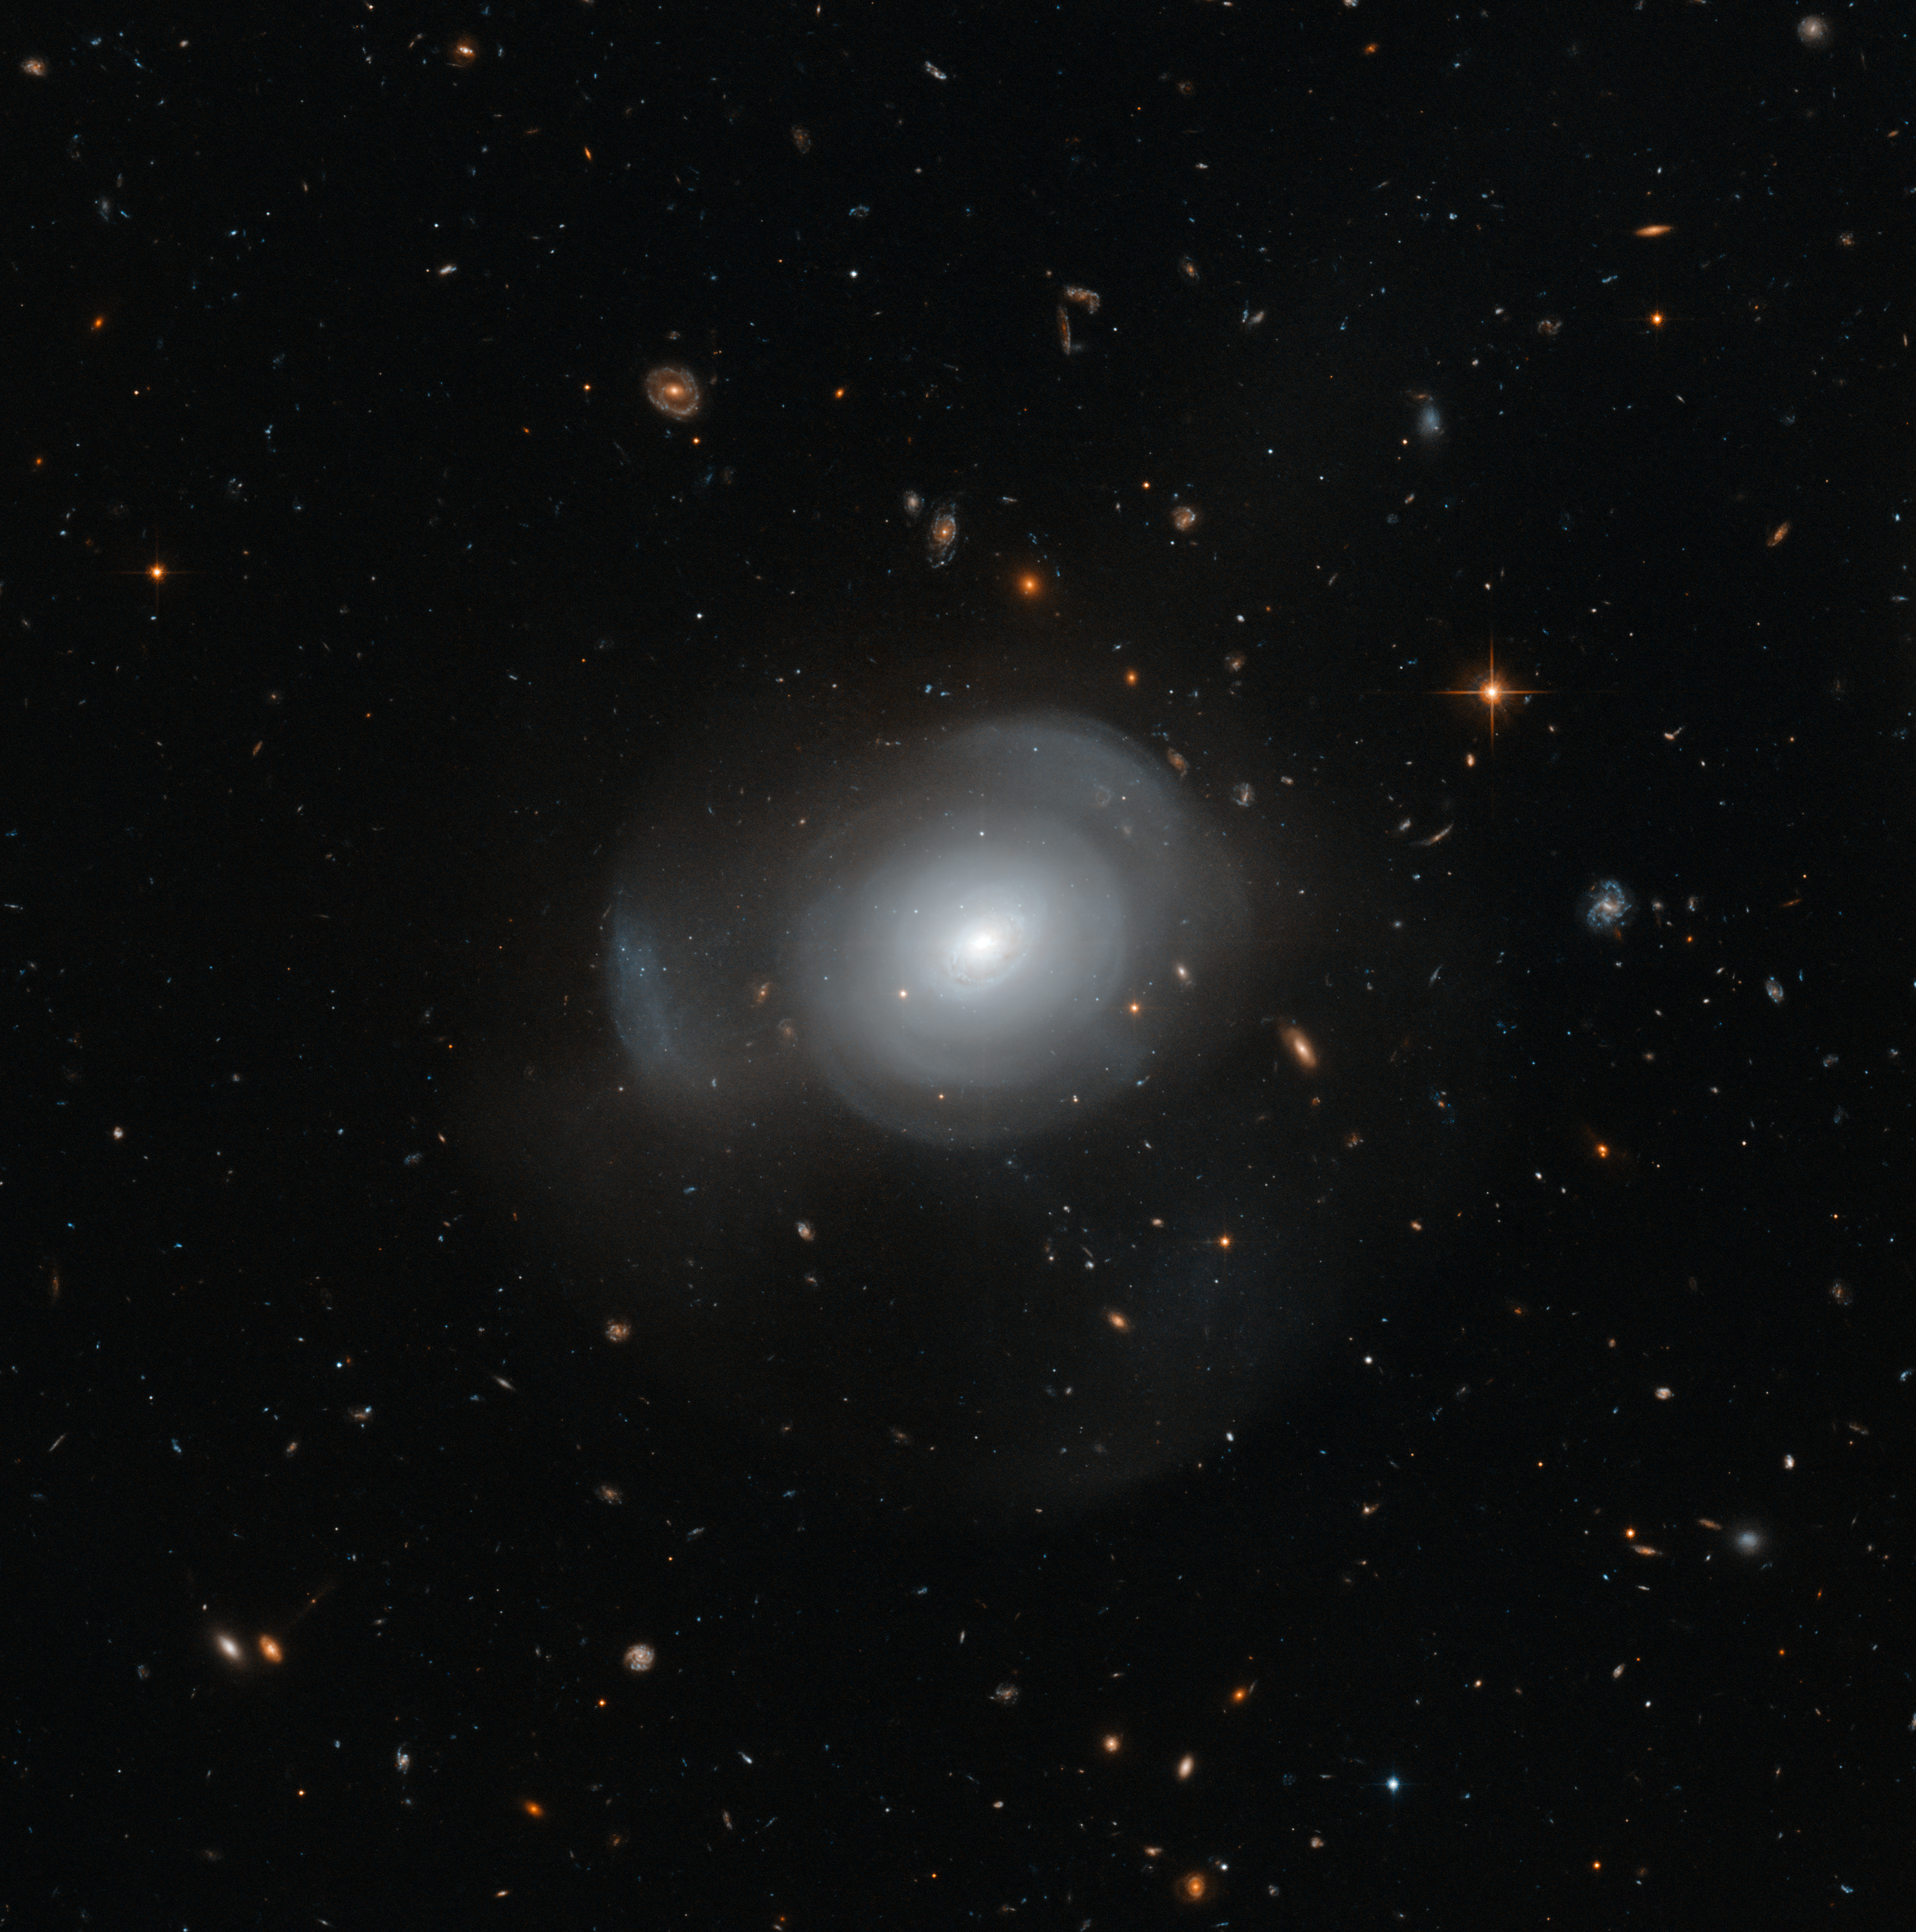

Hubble image of PGC 6240

The beautiful, petal-like shells of galaxy PGC 6240 are captured here in intricate detail by the NASA/ESA Hubble Space Telescope, set against a sky full of distant background galaxies. PGC 6240 is an elliptical galaxy approximately 350 000 000 light years away in the southern constellation of Hydrus (The Water Snake). It is orbited by a number of globular clusters that contain both young and old stars — thought to be a result of a galactic merger in the recent past.

Credit: ESA/Hubble & NASA Acknowledgement: Judy Schmidt